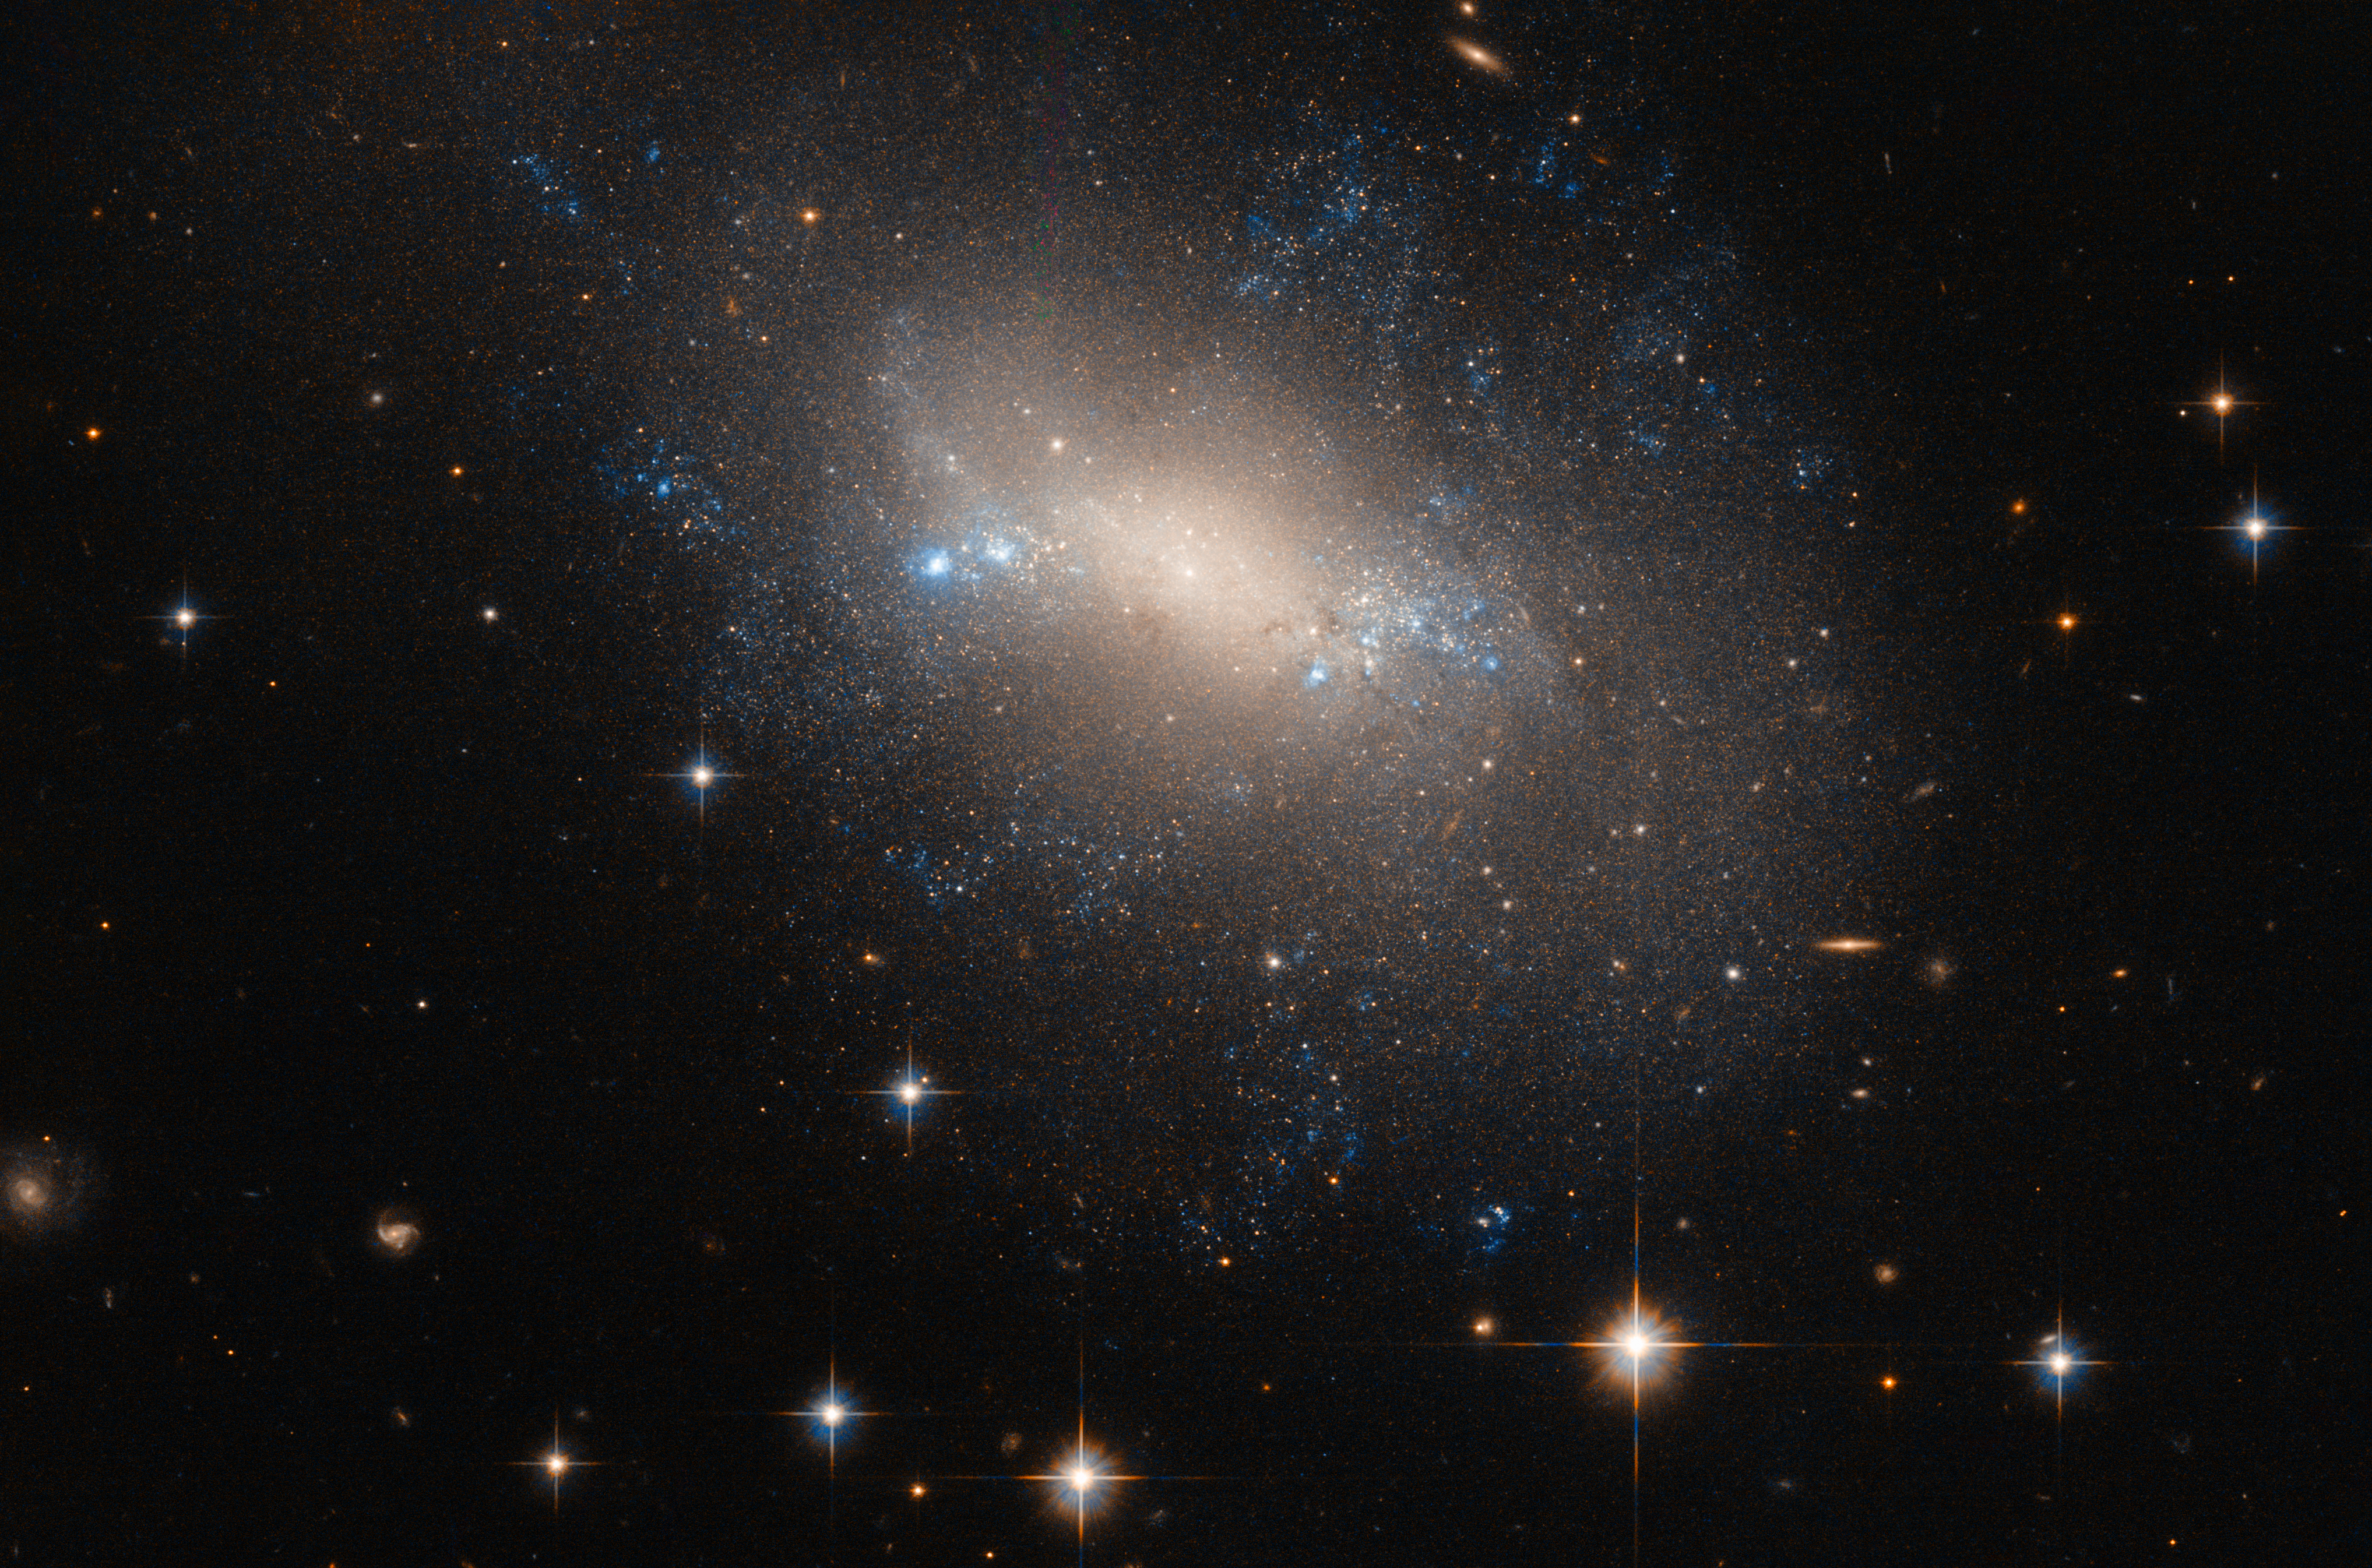

A lopsided lynx

This galaxy, known as NGC 2337, resides 25 million light-years away in the constellation of Lynx. NGC 2337 is an irregular galaxy, meaning that it — along with a quarter of all galaxies in the Universe — lacks a distinct, regular appearance. The galaxy was discovered in 1877 by the French astronomer Édouard Stephan who, in the same year, discovered the galactic group Stephan’s Quintet (heic0910i).

Although irregular galaxies may never win a beauty prize when competing with their more symmetrical spiral and elliptical peers, astronomers consider them to be very important. Some irregular galaxies may have once fallen into one of the regular classes of the Hubble sequence, but were warped and deformed by a passing cosmic companion. As such, irregular galaxies provide astronomers with a valuable opportunity to learn more about galactic evolution and interaction.

Despite the disruption, gravitational interactions between galaxies can kickstart star formation activity within the affected galaxies, which may explain the pockets of blue light scattered throughout NGC 2337. These patches and knots of blue signal the presence of young, newly formed, hot stars.

Credit: ESA/Hubble & NASA